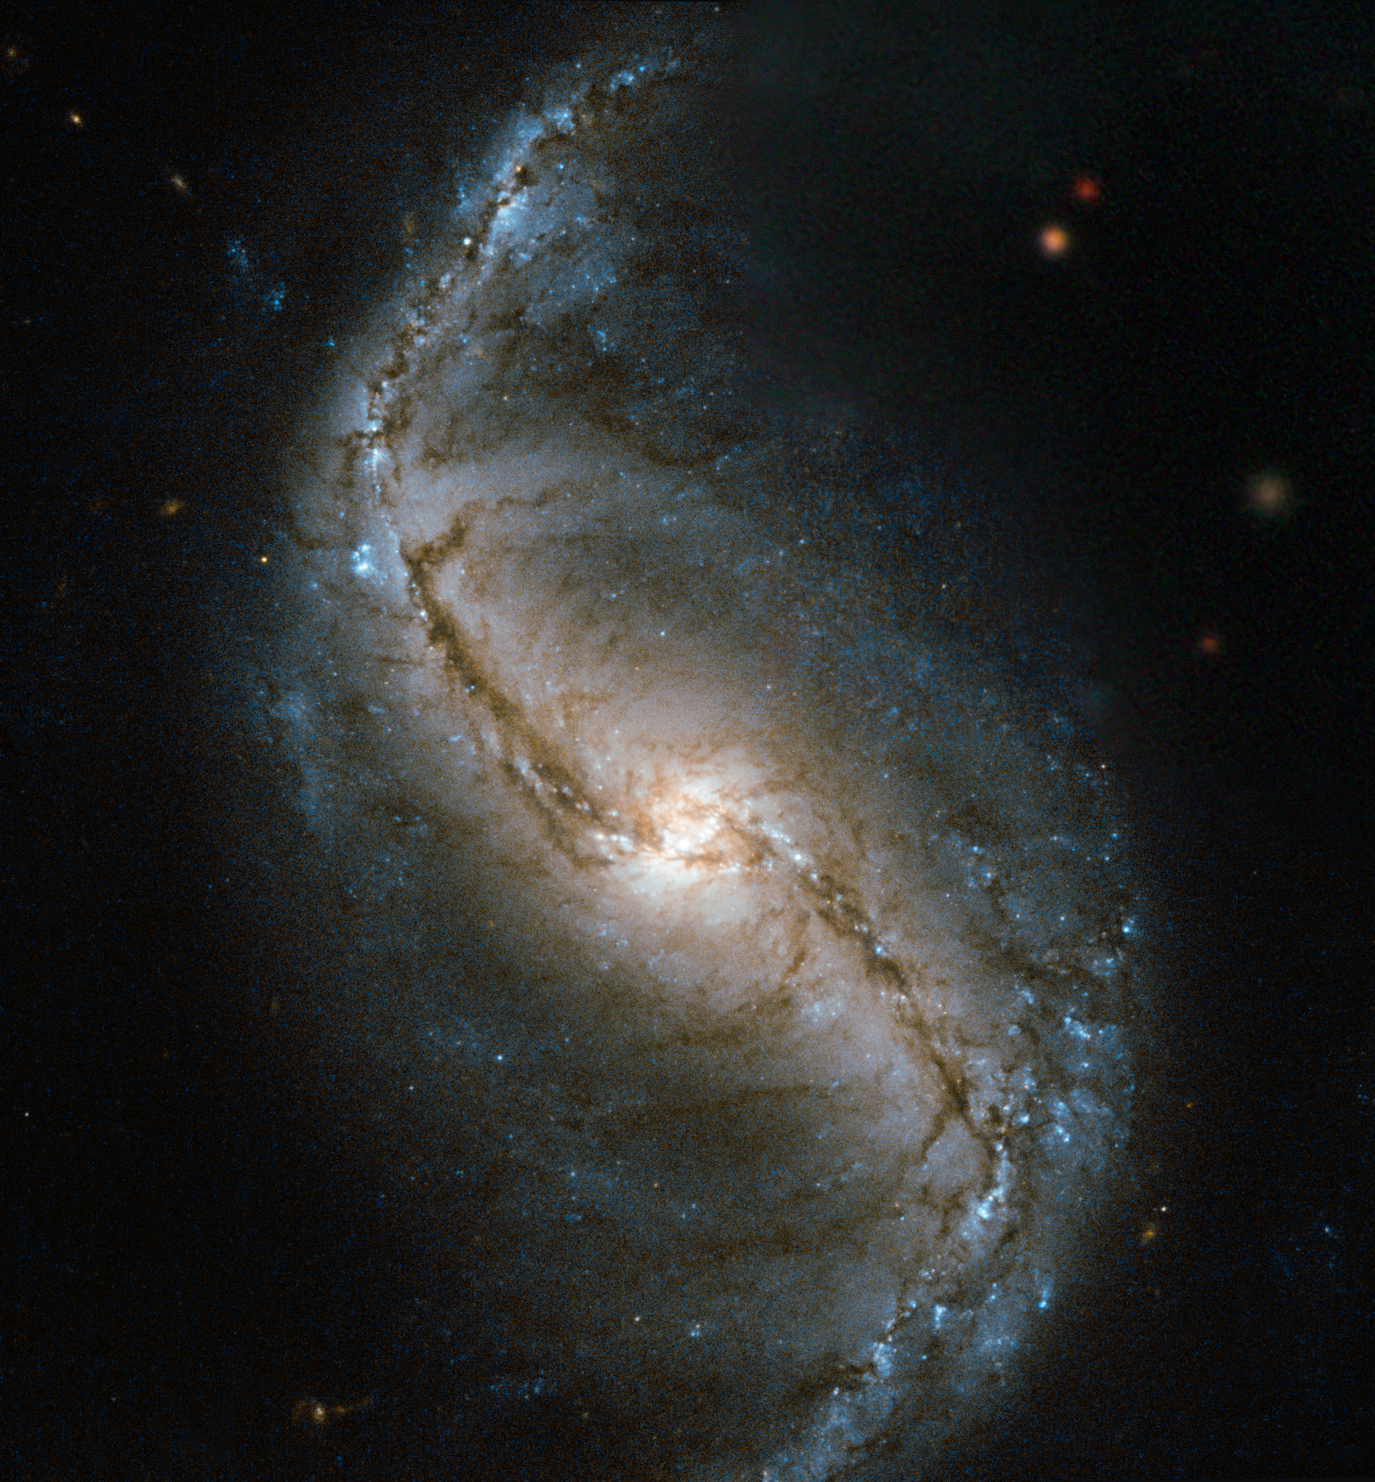

A spiral in a furnace

This new Hubble image is a snapshot of NGC 986 — a barred spiral galaxy discovered in 1828 by James Dunlop. This close-up view of the galaxy was captured by Hubble’s Wide Field and Planetary Camera 2 (WFPC2).

NGC 986 is found in the constellation of Fornax (The Furnace), located in the southern sky. NGC 986 is a bright, 11th-magnitude galaxy sitting around 56 million light-years away, and its golden centre and barred swirling arms are clearly visible in this image.

Barred spiral galaxies are spiral galaxies with a central bar-shaped structure composed of stars. NGC 986 has the characteristic S-shaped structure of this type of galactic morphology. Young blue stars can be seen dotted amongst the galaxy’s arms and the core of the galaxy is also aglow with star formation.

To the top right of this image the stars appear a little fuzzy. This is because a gap in the Hubble data was filled in with data from ground-based telescopes. Although the view we see in this filled in patch is accurate, the resolution of the stars is no match for Hubble’s clear depiction of the spiral galaxy.

Credit: ESA/Hubble & NASA